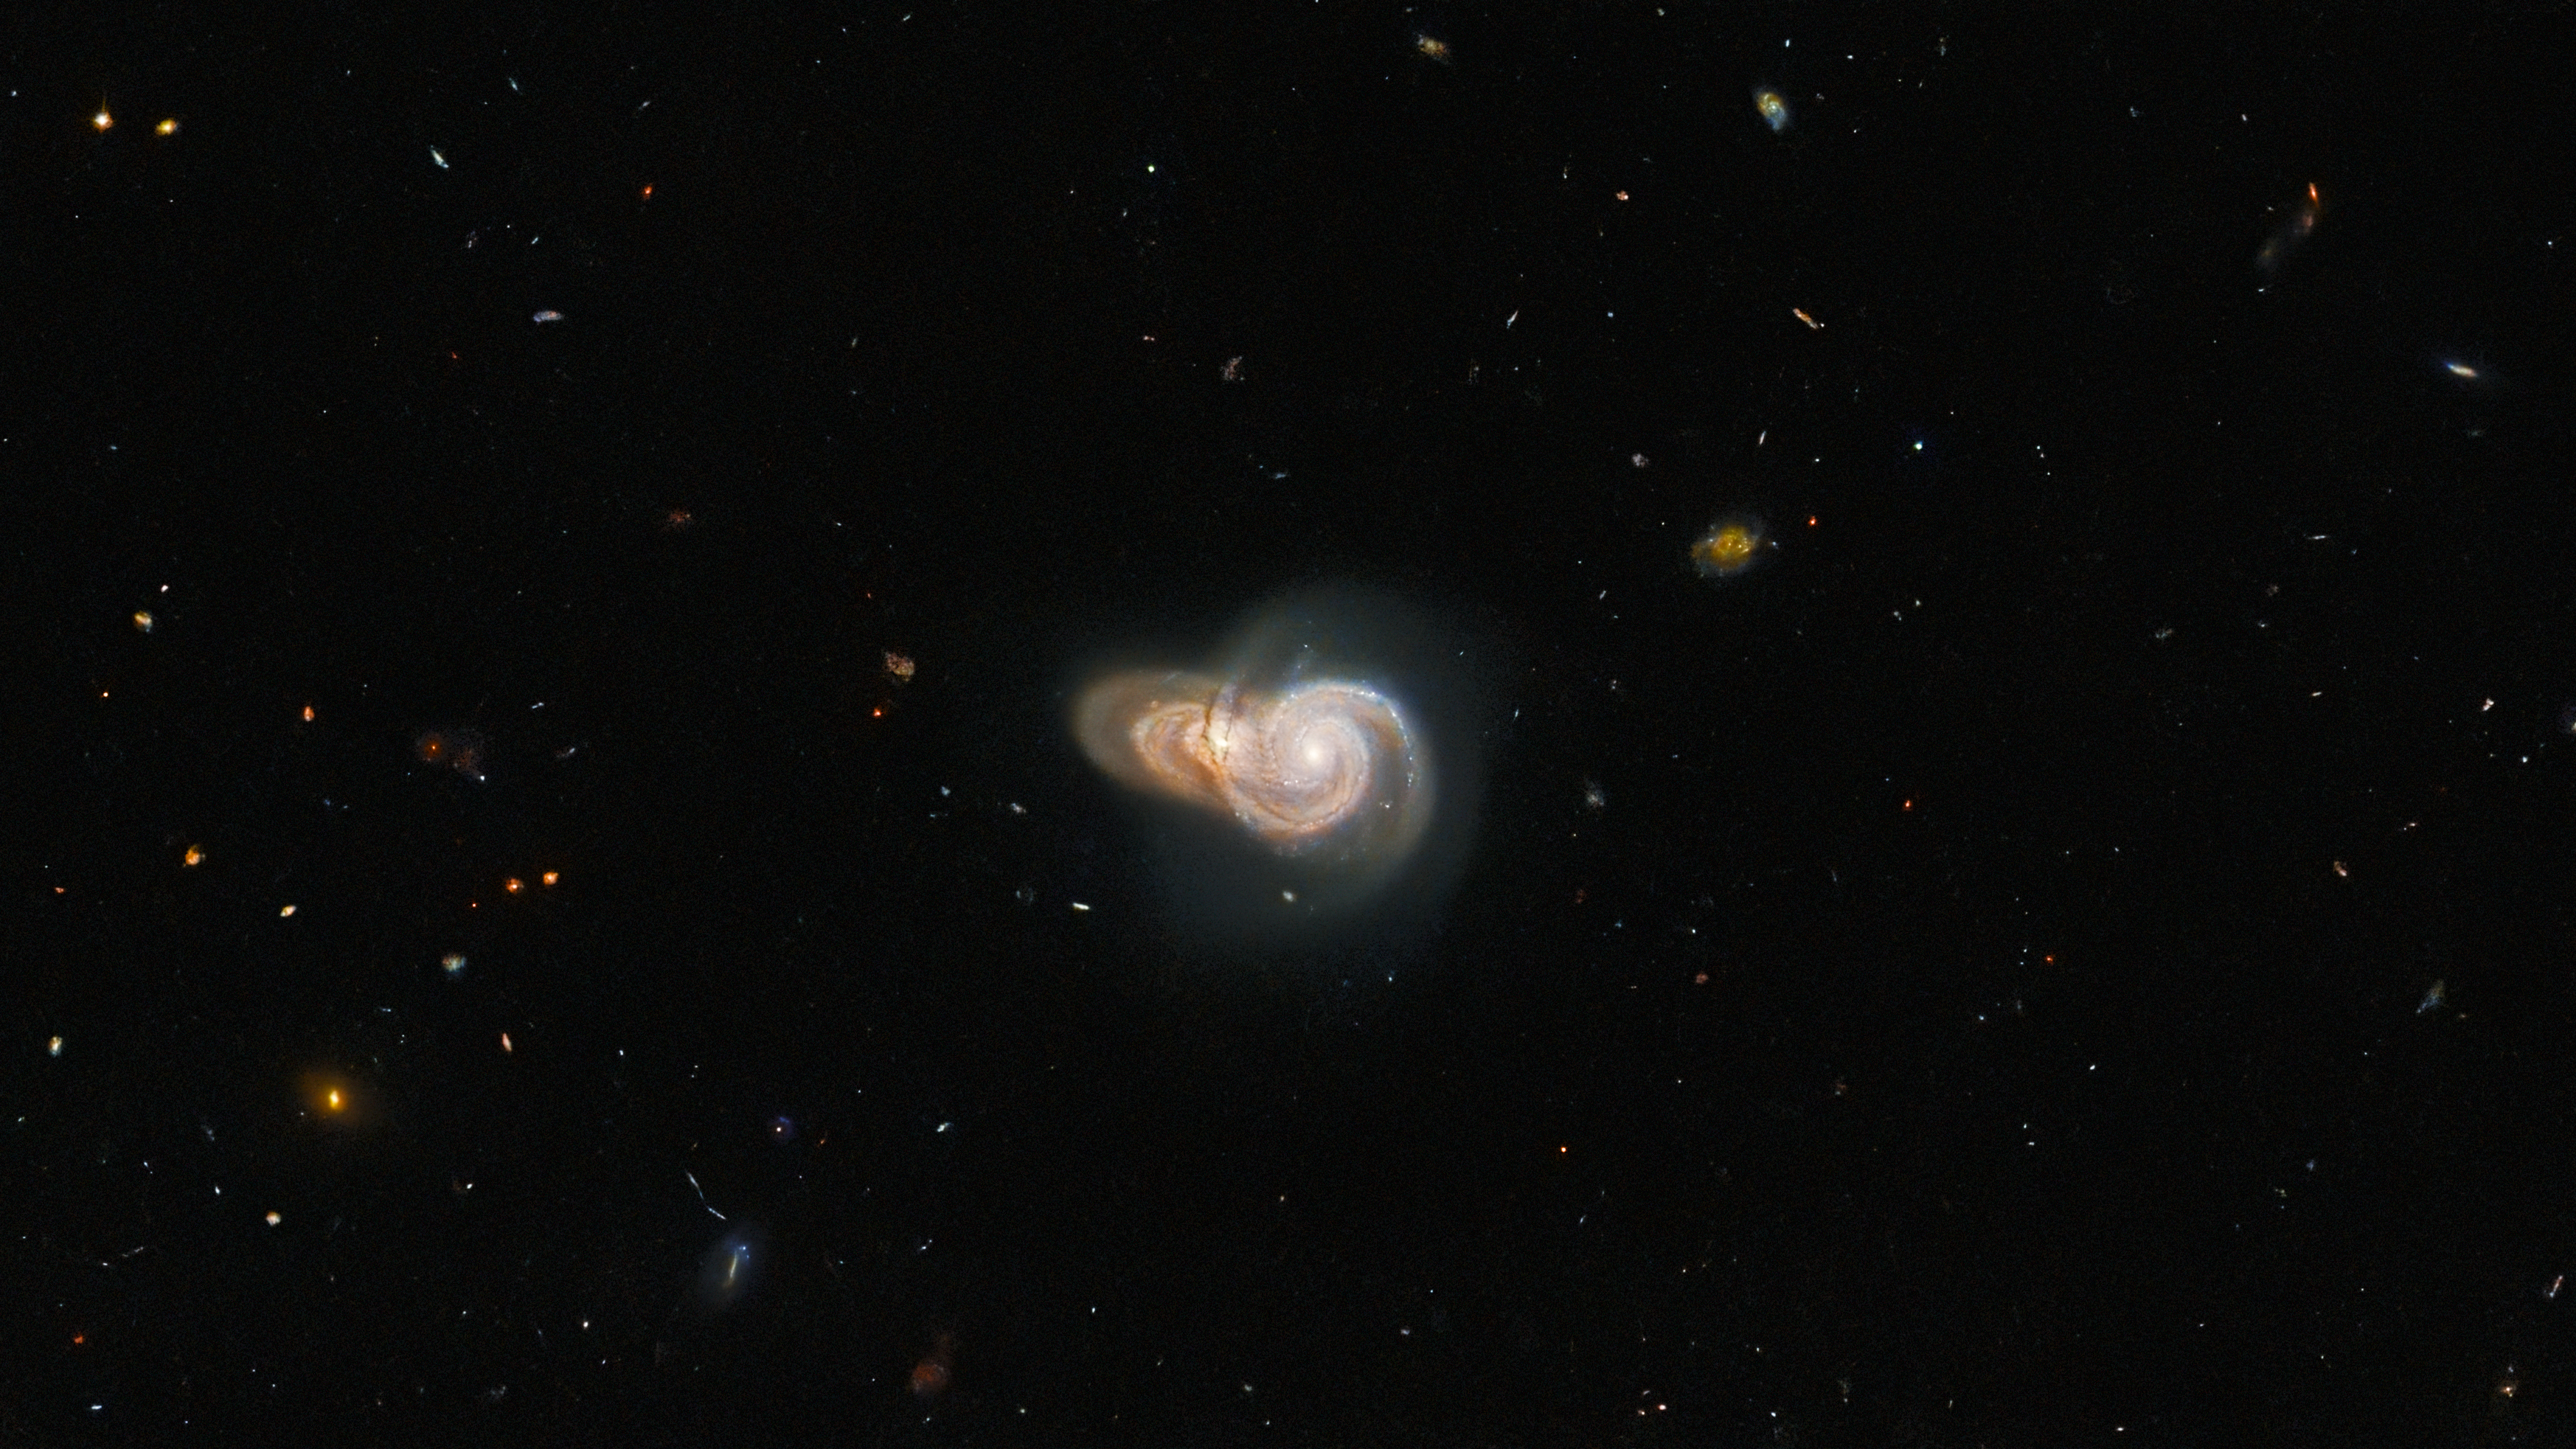

Galactic Overlap

Two overlapping spiral galaxies are pictured in this image from the NASA/ESA Hubble Space Telescope. The two galaxies, which have the uninspiring names SDSS J115331 and LEDA 2073461, lie more than a billion light-years from Earth. Despite appearing to collide in this image, the alignment of the two galaxies is likely just by chance — the two are not actually interacting. While these two galaxies might simply be ships that pass in the night, Hubble has captured a dazzling array of interacting galaxies in the past.

This image is one of many Hubble observations delving into highlights of the Galaxy Zoo project. Originally established in 2007, the Galaxy Zoo project and its successors are massive citizen science projects which crowdsource galaxy classifications from a pool of hundreds of thousands of volunteers. These volunteers classify galaxies imaged by robotic telescopes and are often the first to ever set eyes on an astronomical object.

Over the course of the original Galaxy Zoo project, volunteers discovered a menagerie of weird and wonderful galaxies such as unusual 3-armed spiral galaxies and colliding ring galaxies. The astronomers coordinating the project applied for Hubble time to observe the most unusual inhabitants of the Galaxy Zoo — but true to the project’s crowdsourced roots, the list of targets was chosen by a public vote.

Credit: ESA/Hubble & NASA, W. Keel, Dark Energy Survey/DOE/FNAL/NOIRLab/NSF/AURA, SDSS